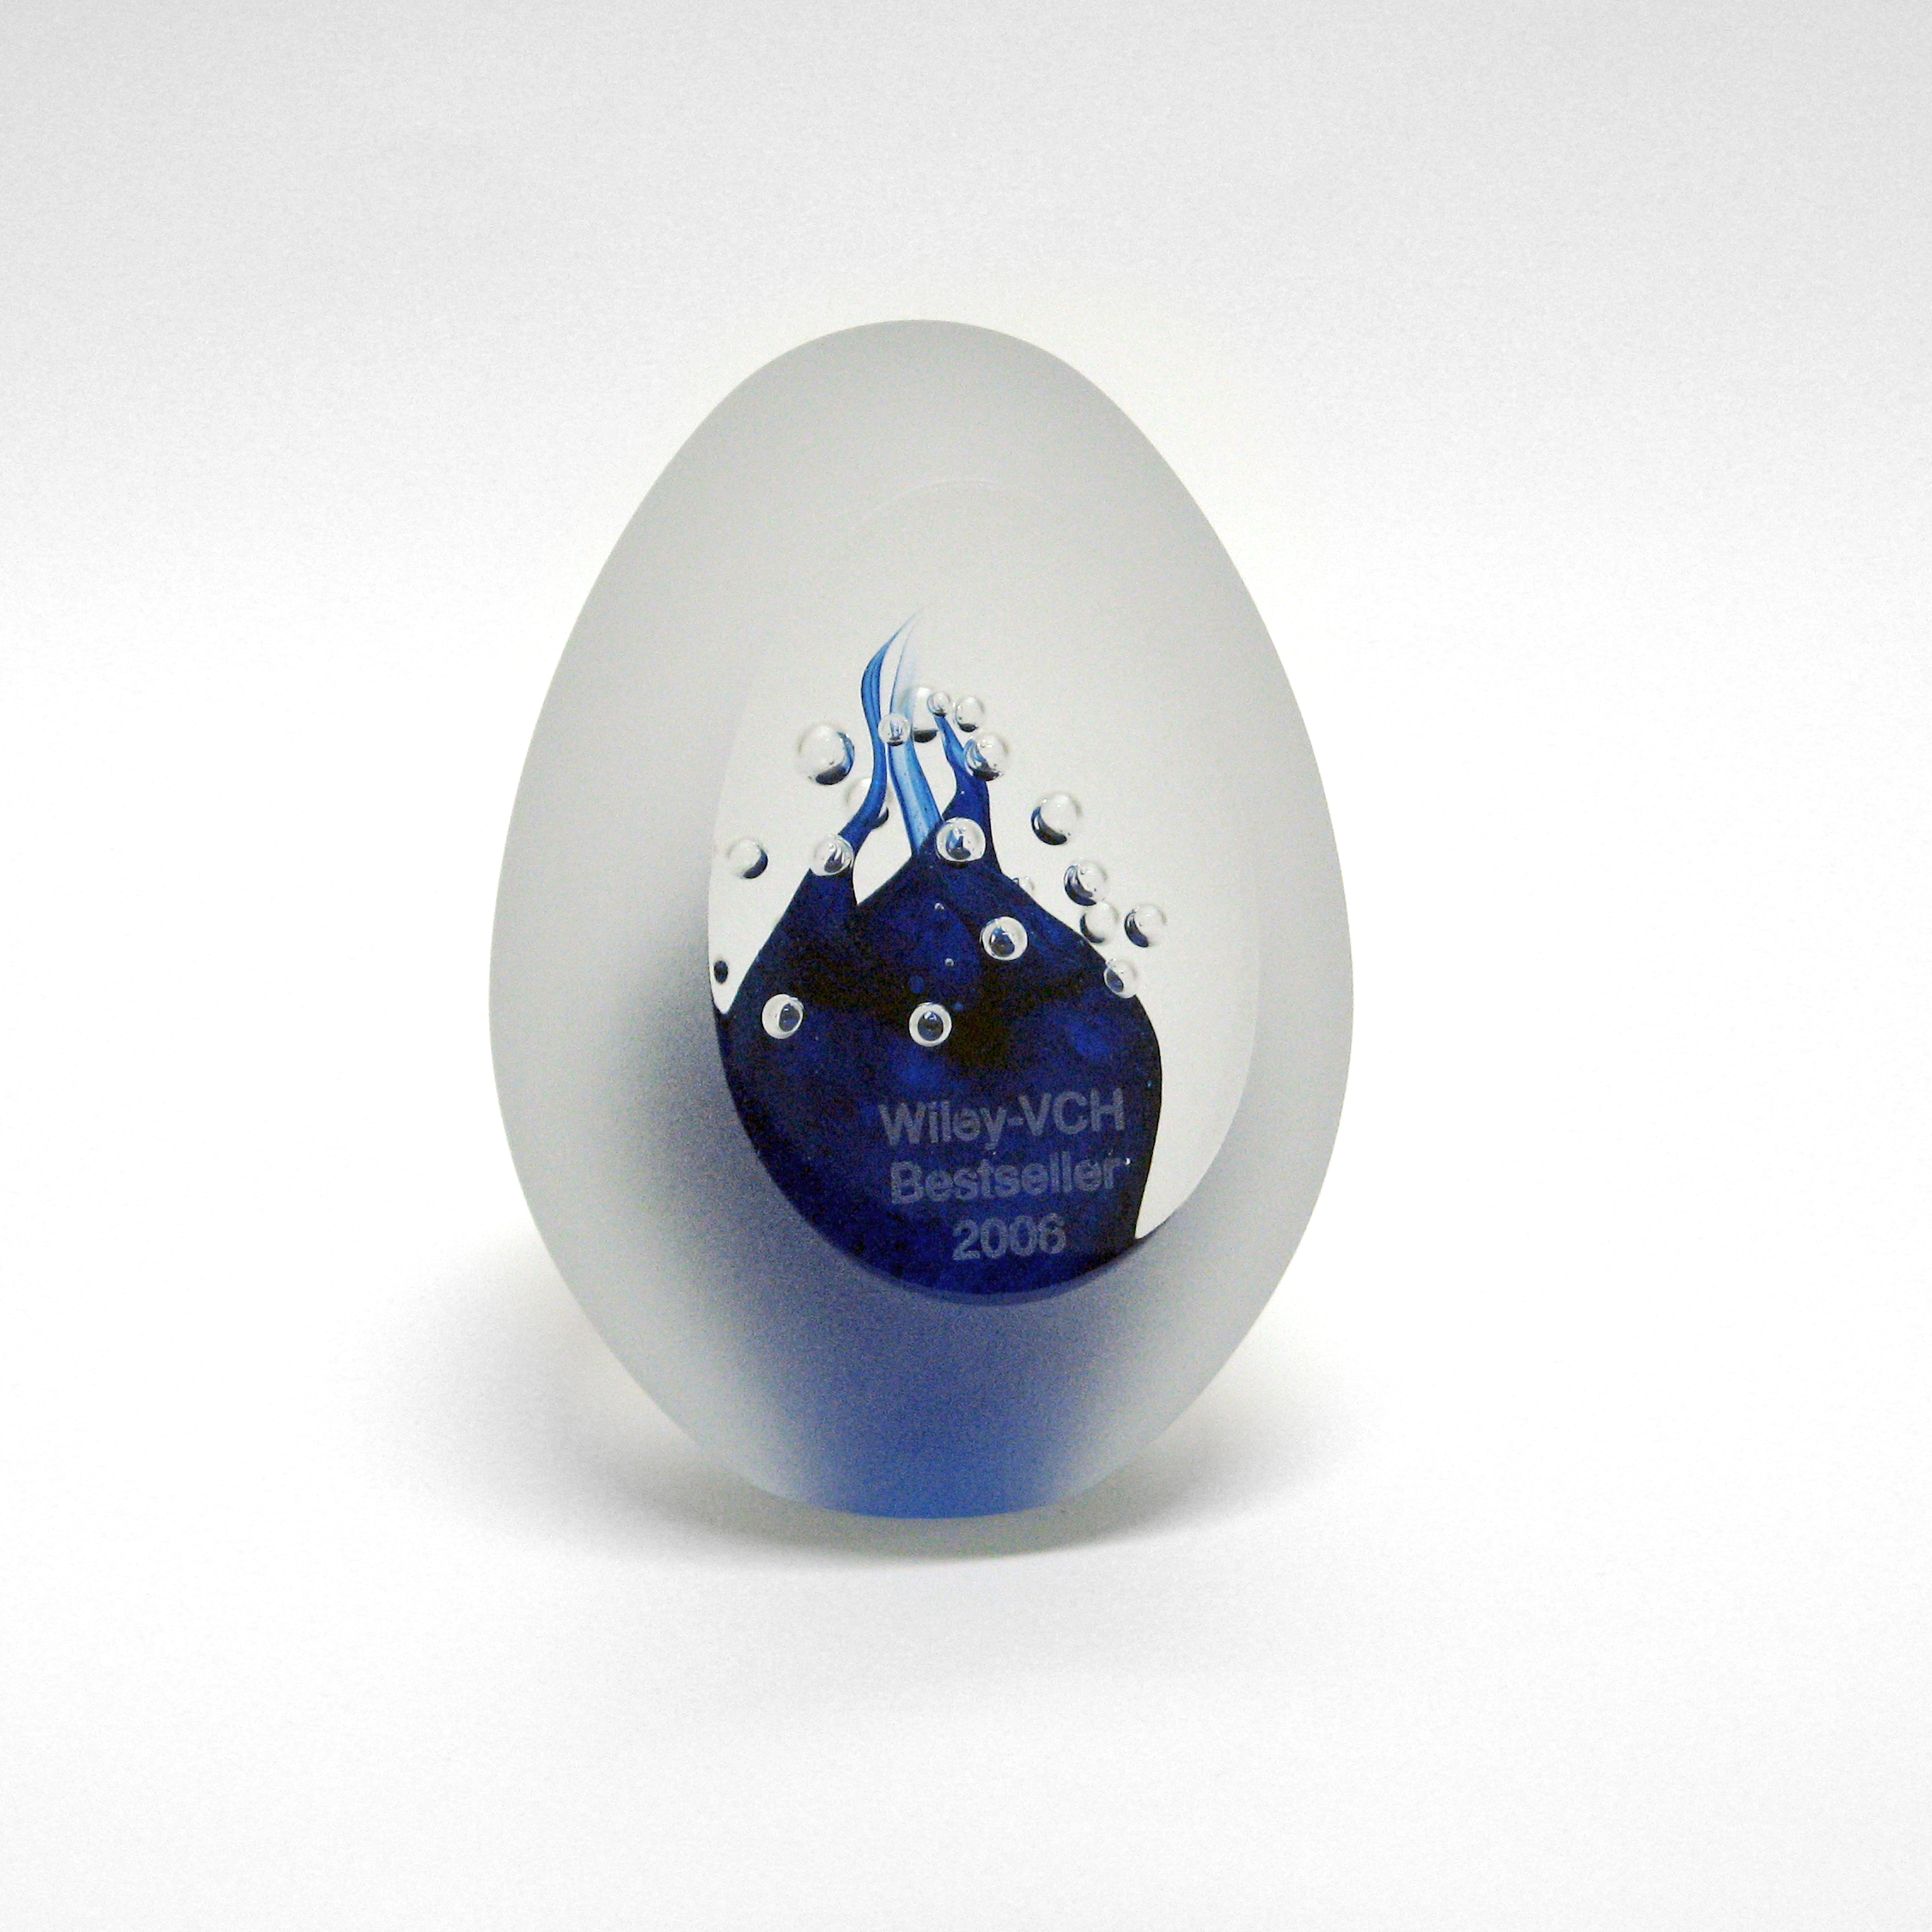

"Hubble – 15 Years of Discovery" gets the "Wiley-VCH Bestseller 2006" prize

The German version of the "Hubble – 15 Years of Discover" book called "Hubble – 15 Jahre auf Entdeckungsreise" was just announced as the 3rd best selling German-language book from the large international publisher Wiley-VCH in 2006. This book forms part of the European Space Agency's 15th anniversary celebration activities for the 1990 launch of the NASA/ESA Hubble Space Telescope and was produced by the ESA/Hubble astronomy outreach team in Germany. As a prize, the authors received an engraved crystal trophy that can be seen in the image above.

Hubble's eye-catching images certainly have an artistic potential and this book shows the close relationship between the two at its best. To date the successful Hubble picture book has been translated from English to four languages: Finnish, German, Portuguese and German.

Credit: NASA & ESA